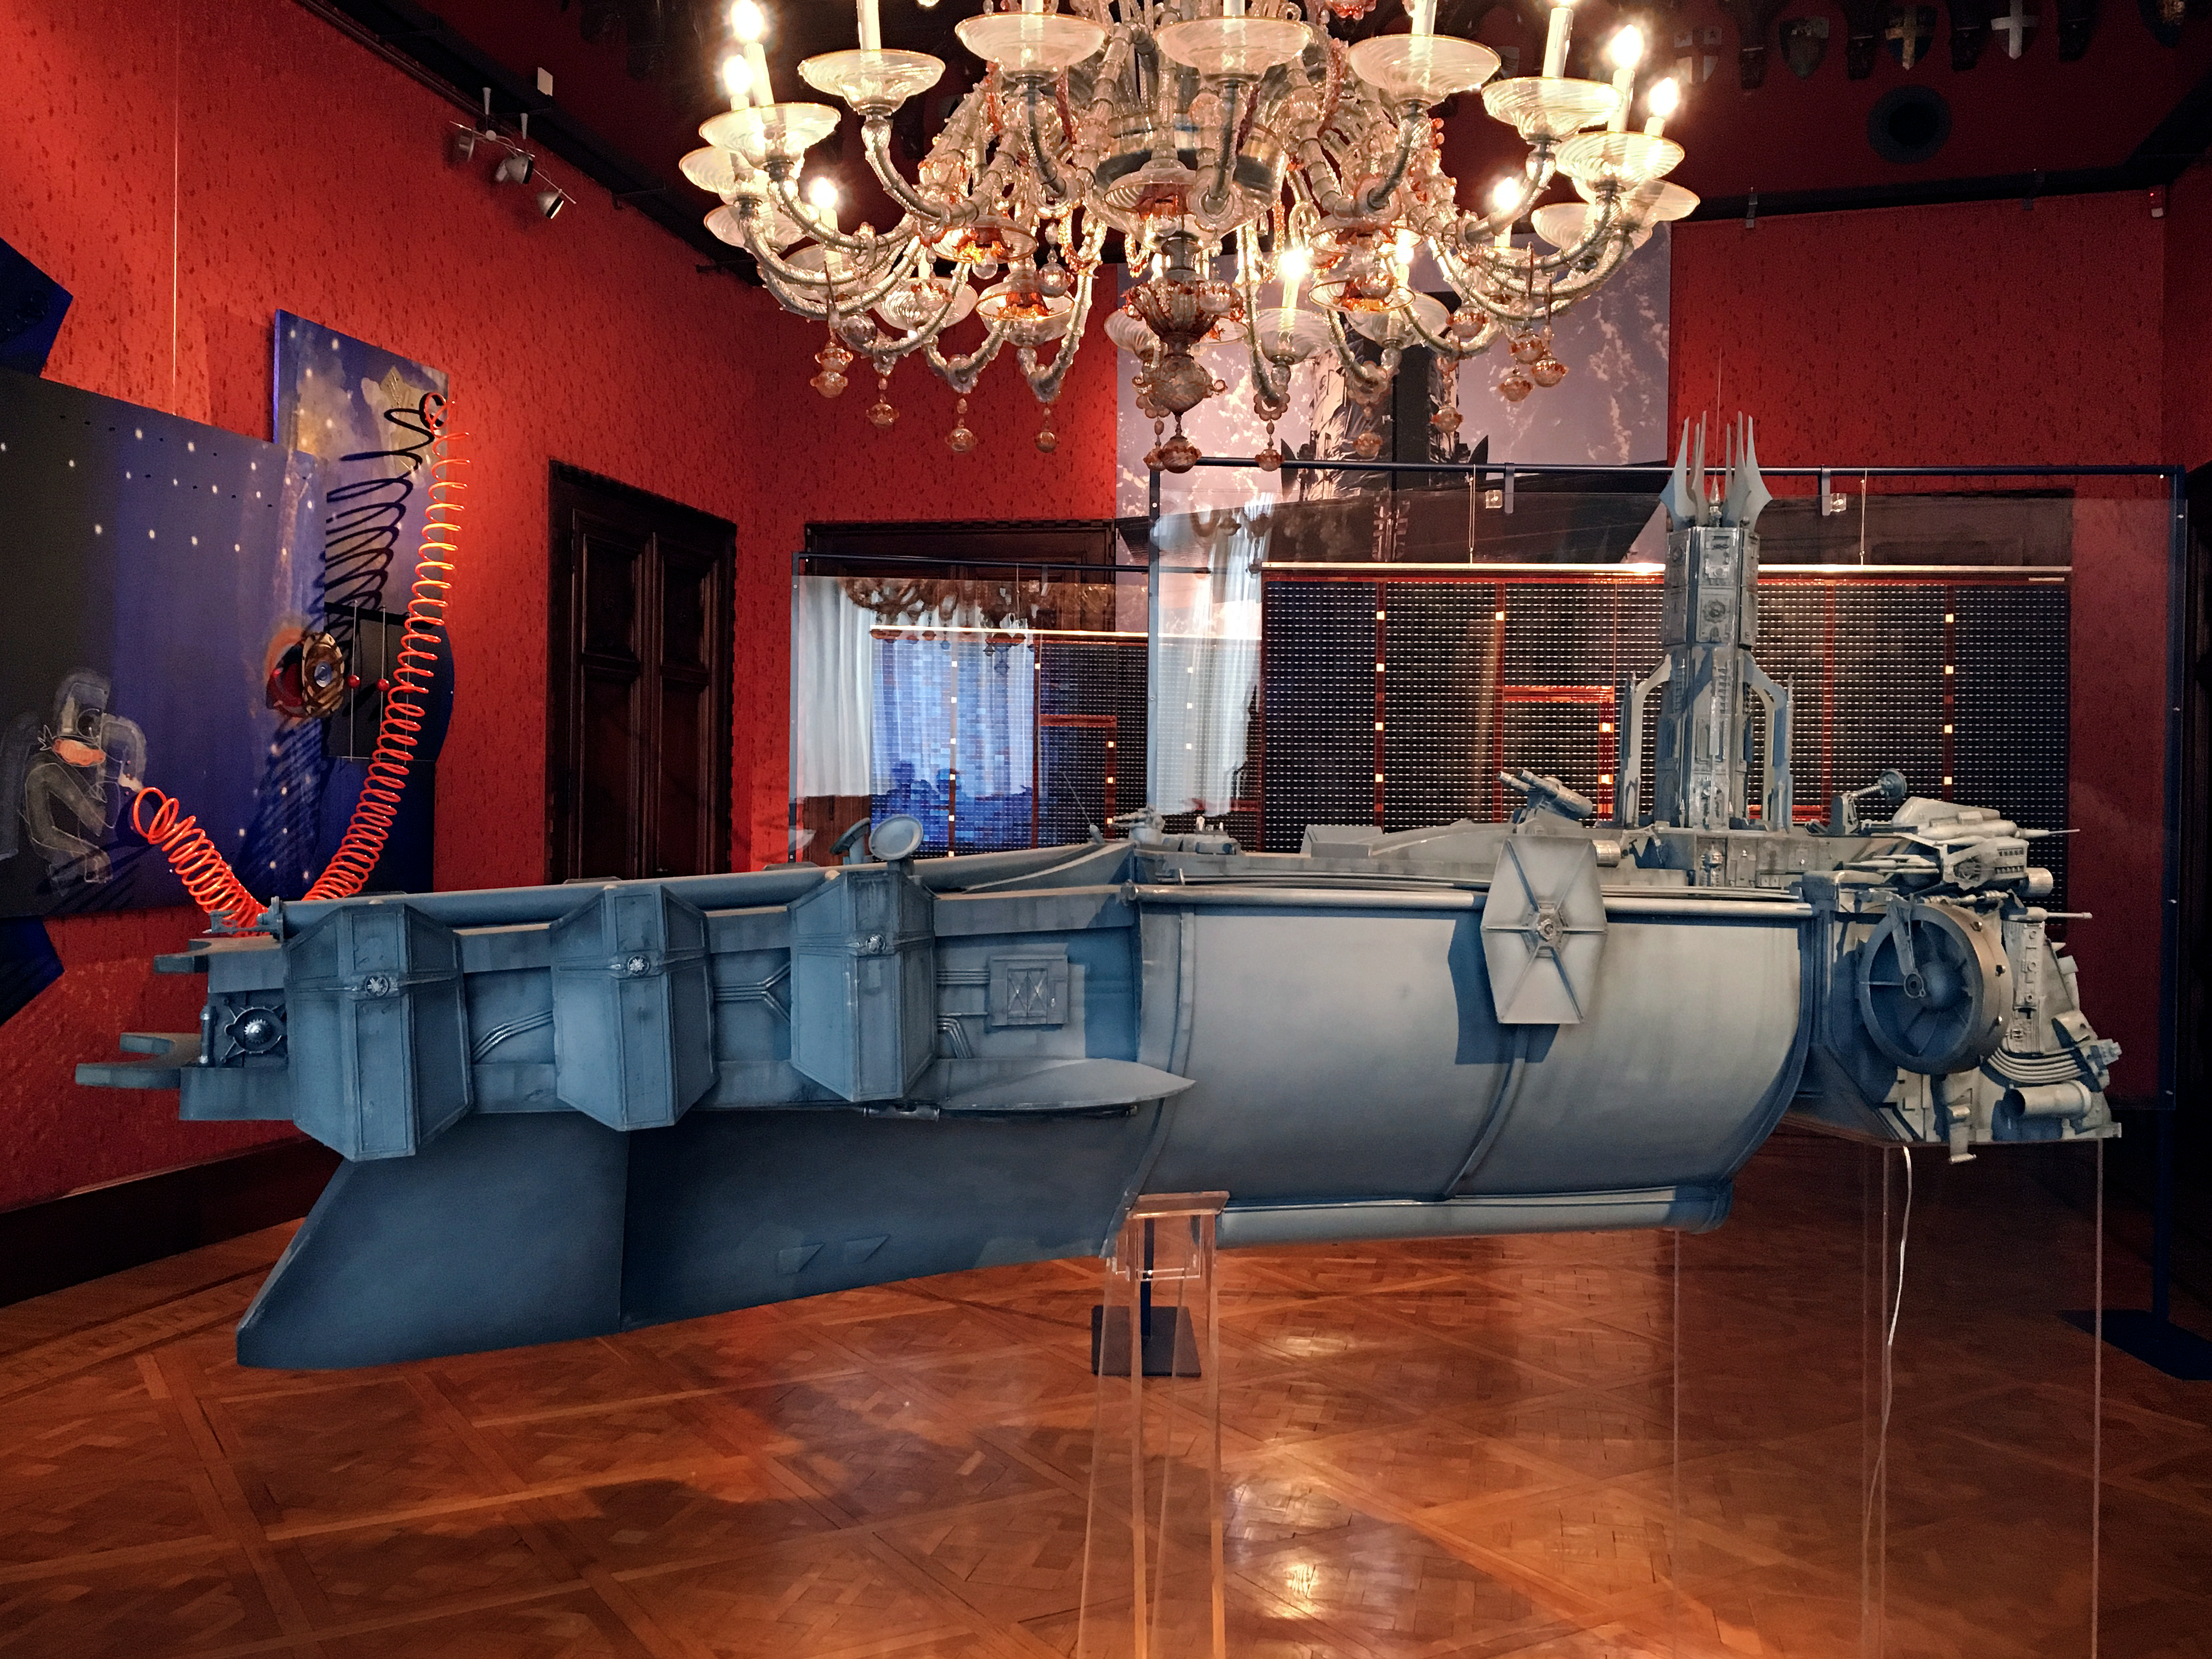

Our Place in Space spaceship

Hubble is a symbol for humanity's urge to explore and to discover the frontiers of space. Marco Bolognesi’s contribution to the exhibition is a large spaceship — the classic machine to explore outer space.

Credit: ESA/Hubble, Pam Jeffries